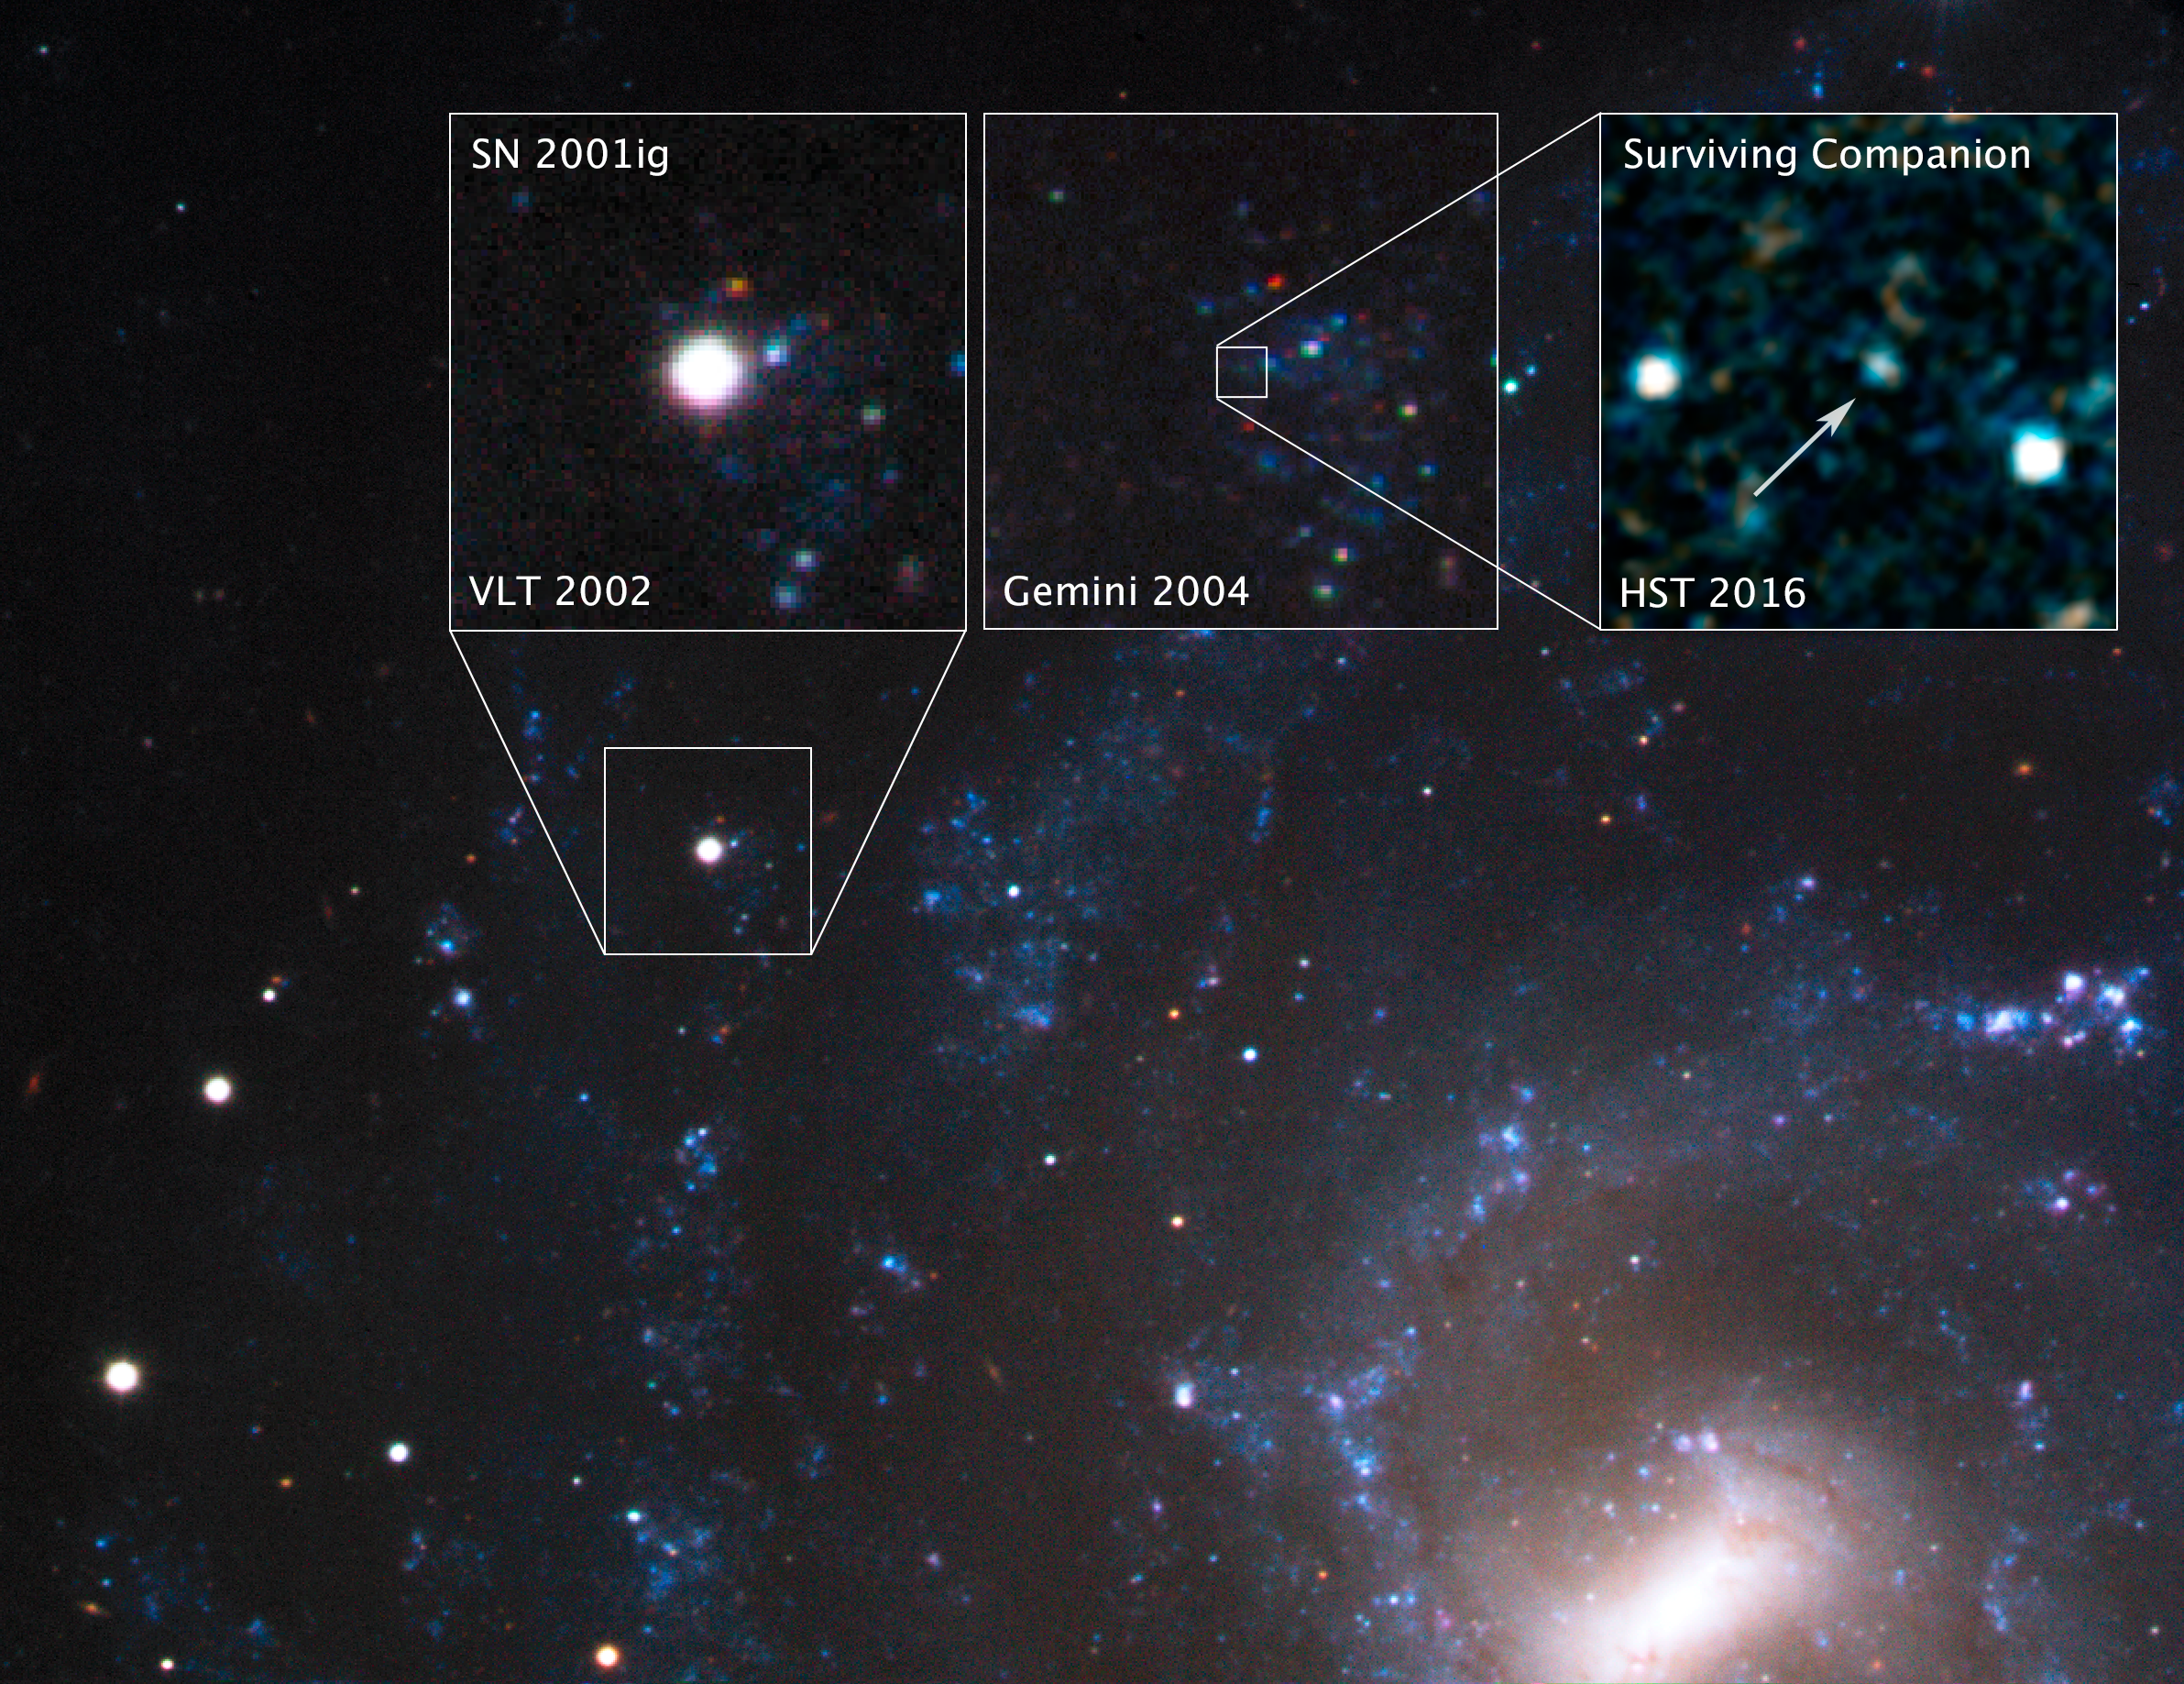

SN 2001ig in NGC 7424

Seventeen years ago, astronomers witnessed supernova 2001ig go off 40 million light-years away in the galaxy NGC 7424, in the southern constellation Grus, the Crane. Shortly after SN 2001ig exploded, scientists photographed the supernova with the European Southern Observatory’s Very Large Telescope (VLT) in 2002. Two years later, they followed up with the Gemini South Observatory, which hinted at the presence of a surviving binary companion. As the supernova’s glow faded, scientists focused the NASA/ESA Hubble Space Telescope on that location in 2016. They pinpointed and photographed the surviving companion, which was possible only due to Hubble’s exquisite resolution and ultraviolet sensitivity. Hubble observations of SN 2001ig provide the best evidence yet that some supernovas originate in double-star systems.

Credit: NASA, ESA, S. Ryder (Australian Astronomical Observatory), and O. Fox (STScI)